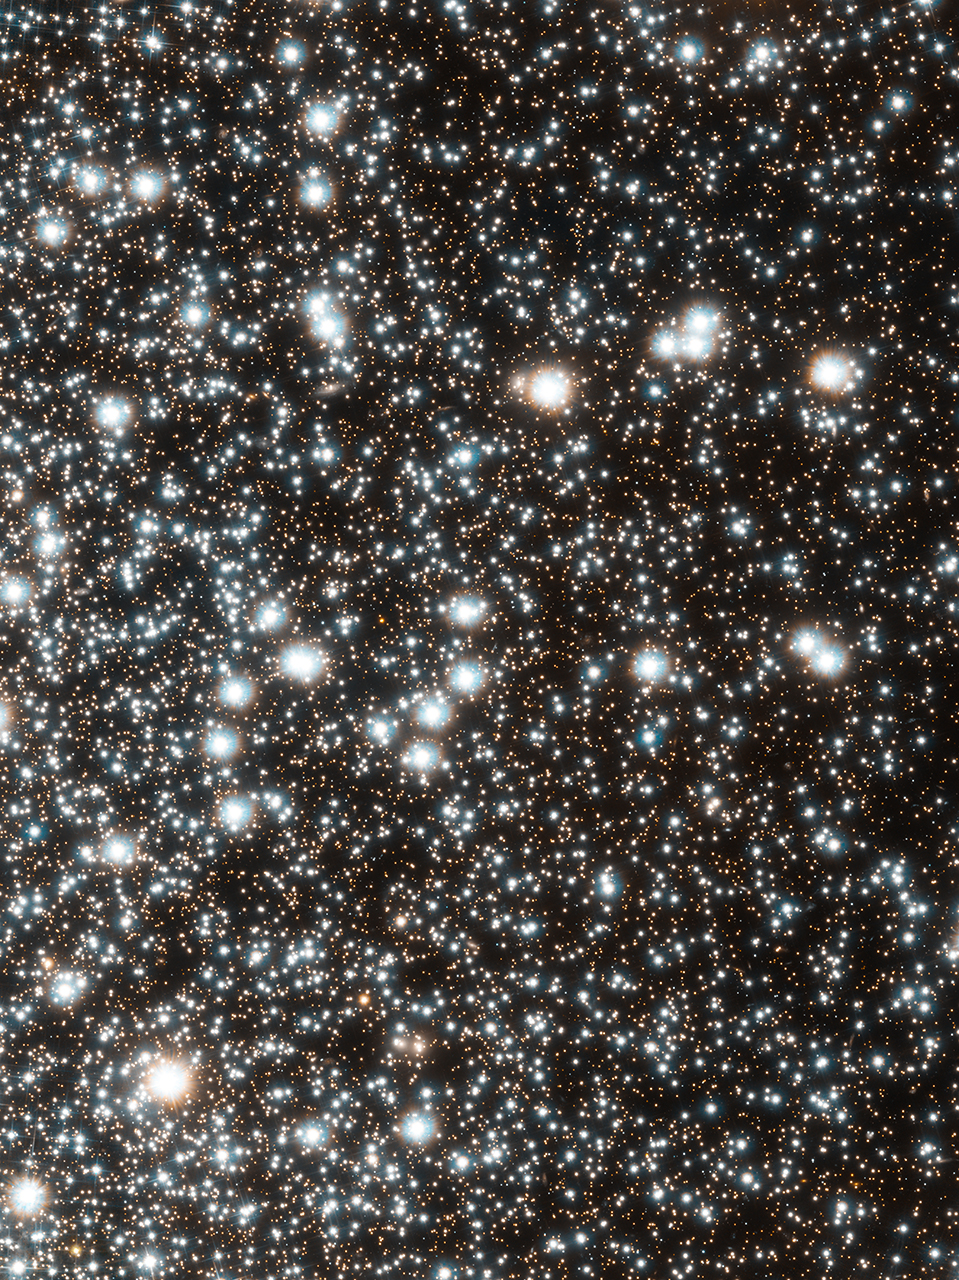

Hubble image of globular cluster 47 Tucanae

This new Hubble image captures close-up views of thousands of cluster stars within globular cluster 47 Tucanae. The large bright stars in the image are red giants. These stars have puffed up to several times their normal size because they have exhausted their nuclear fuel and are near the end of their lives. The image was taken by Hubble's Advanced Camera for Surveys.

Astronomers used these Hubble observations along with archival Hubble data of 47 Tucanae to accurately measure the changes in positions of more than 30 000 cluster stars. Based on those measurements, the astronomers pieced together the stars' histories, finding two populations of stars that have different chemical compositions and different motions.

This image was taken between January and October 2010.

Credit: NASA, ESA, H. Richer and J. Heyl (University of British Columbia), and J. Anderson and J. Kalirai (STScI)